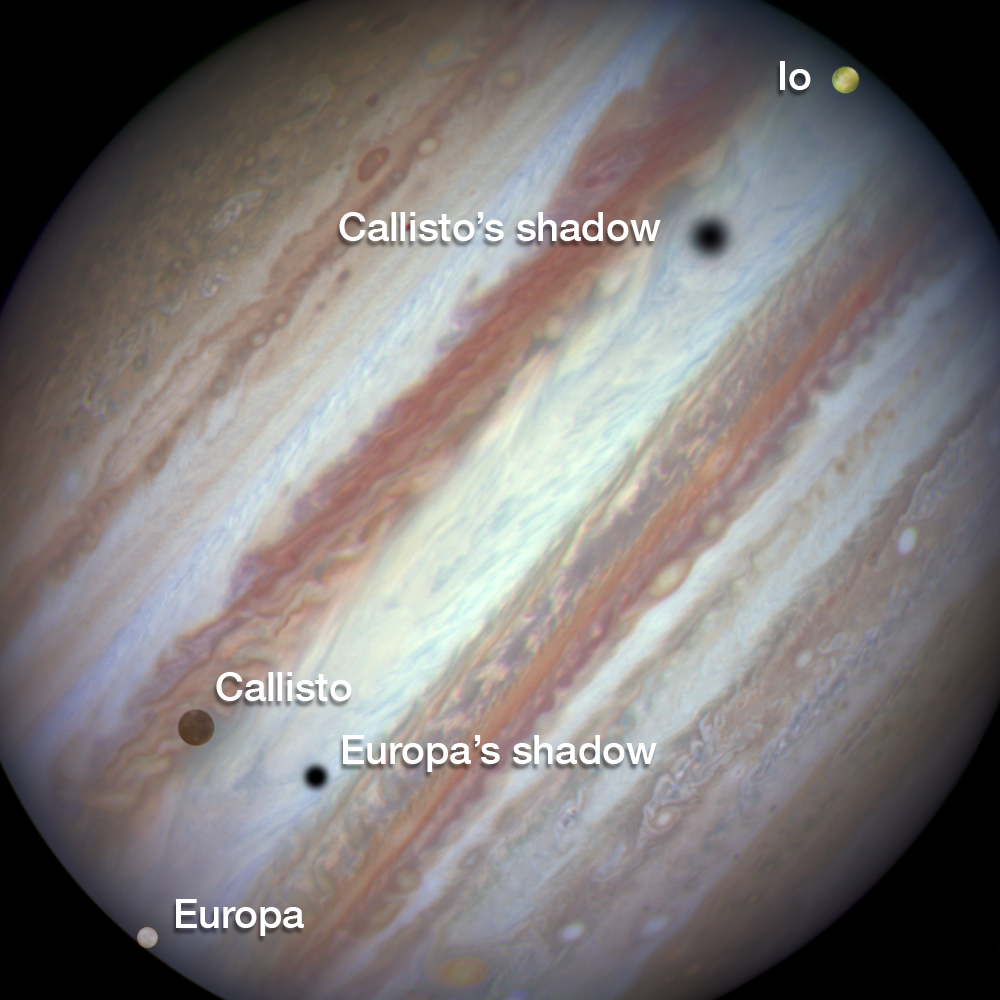

Three moons and their shadows parade across Jupiter — end of event, annotated

This new NASA/ESA Hubble Space Telescope image captures a rare occurrence as three of Jupiter’s largest moons parade across the giant gas planet’s banded face.

The image shows the end of the event. Europa has entered the frame at lower left with slower-moving Callisto above and to the right of it. Meanwhile Io — which orbits significantly closer to Jupiter — is approaching the eastern limb of the planet.

The movement of the moons is shown in the video created from Hubble stills.

Credit: NASA, ESA, Hubble Heritage Team